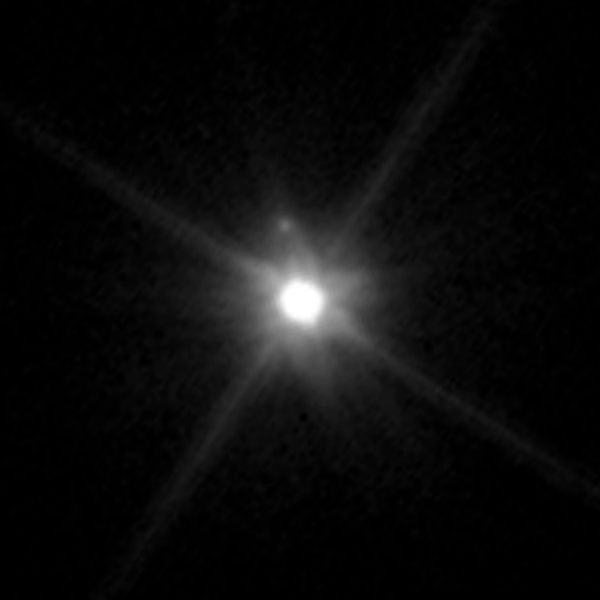

Makemake and its moon

This Hubble Space Telescope image reveals the first moon ever discovered around the dwarf planet Makemake. The tiny moon, located just above Makemake in this image, is barely visible because it is almost lost in the glare of the very bright dwarf planet. The moon, nicknamed MK 2, is roughly 160 kilometres wide and orbits about 21,000 kilometres from Makemake. Makemake is 1,300 times brighter than its moon and is also much larger, at 2,200 kilometres across.

The Makemake system is more than 50 times farther than the Earth is from the Sun. The pair resides on the outskirts of our solar system in the Kuiper Belt, a vast region of frozen debris from the construction of our solar system 4.5 billion years ago.

Previous searches for a moon around Makemake turned up empty. The moon may be in an edge-on orbit, so part of the time it gets lost in the bright glare of Makemake.

Hubble's sharp-eyed Wide Field Camera 3 made the observation in April 2015.

Credit: NASA, ESA, and A. Parker and M. Buie (Southwest Research Institute)